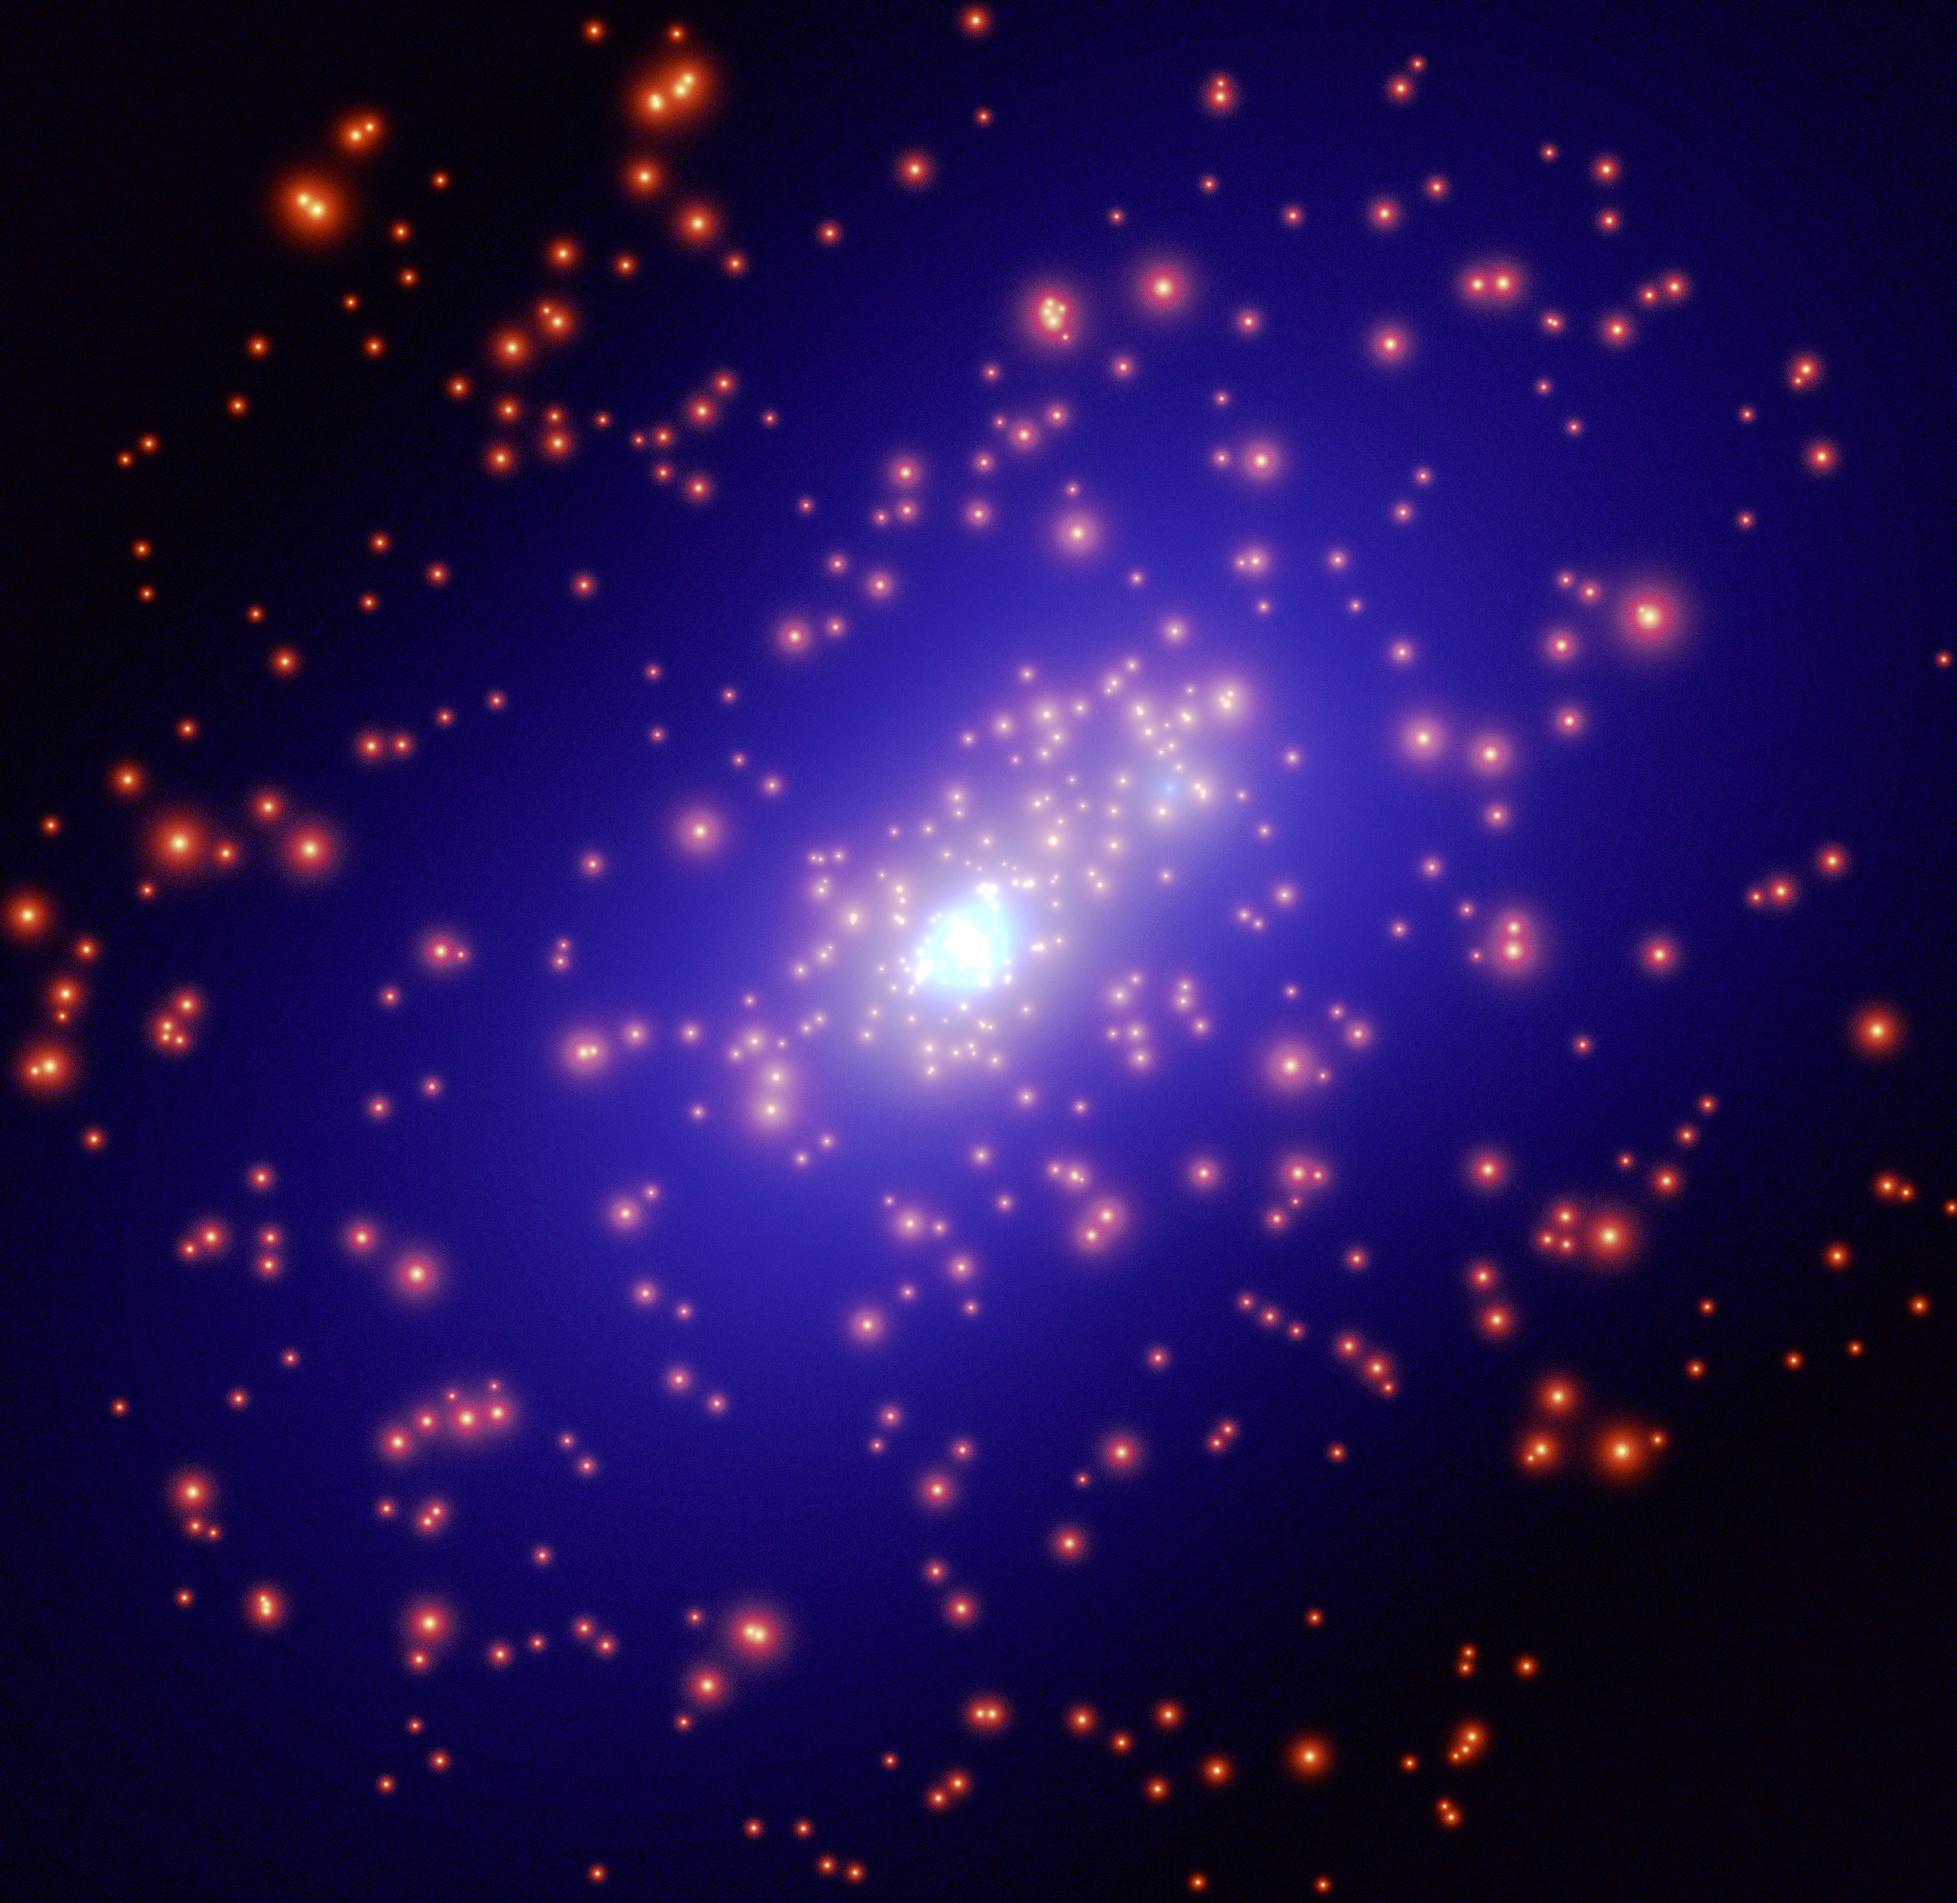

Unique Mass Map

This is a mass map of galaxy cluster CL0024+1654 derived from an extensive Hubble Space Telescope campaign.

Credit: European Space Agency, NASA and Jean-Paul Kneib (Observatoire Midi-Pyrénées, France/Caltech, USA)